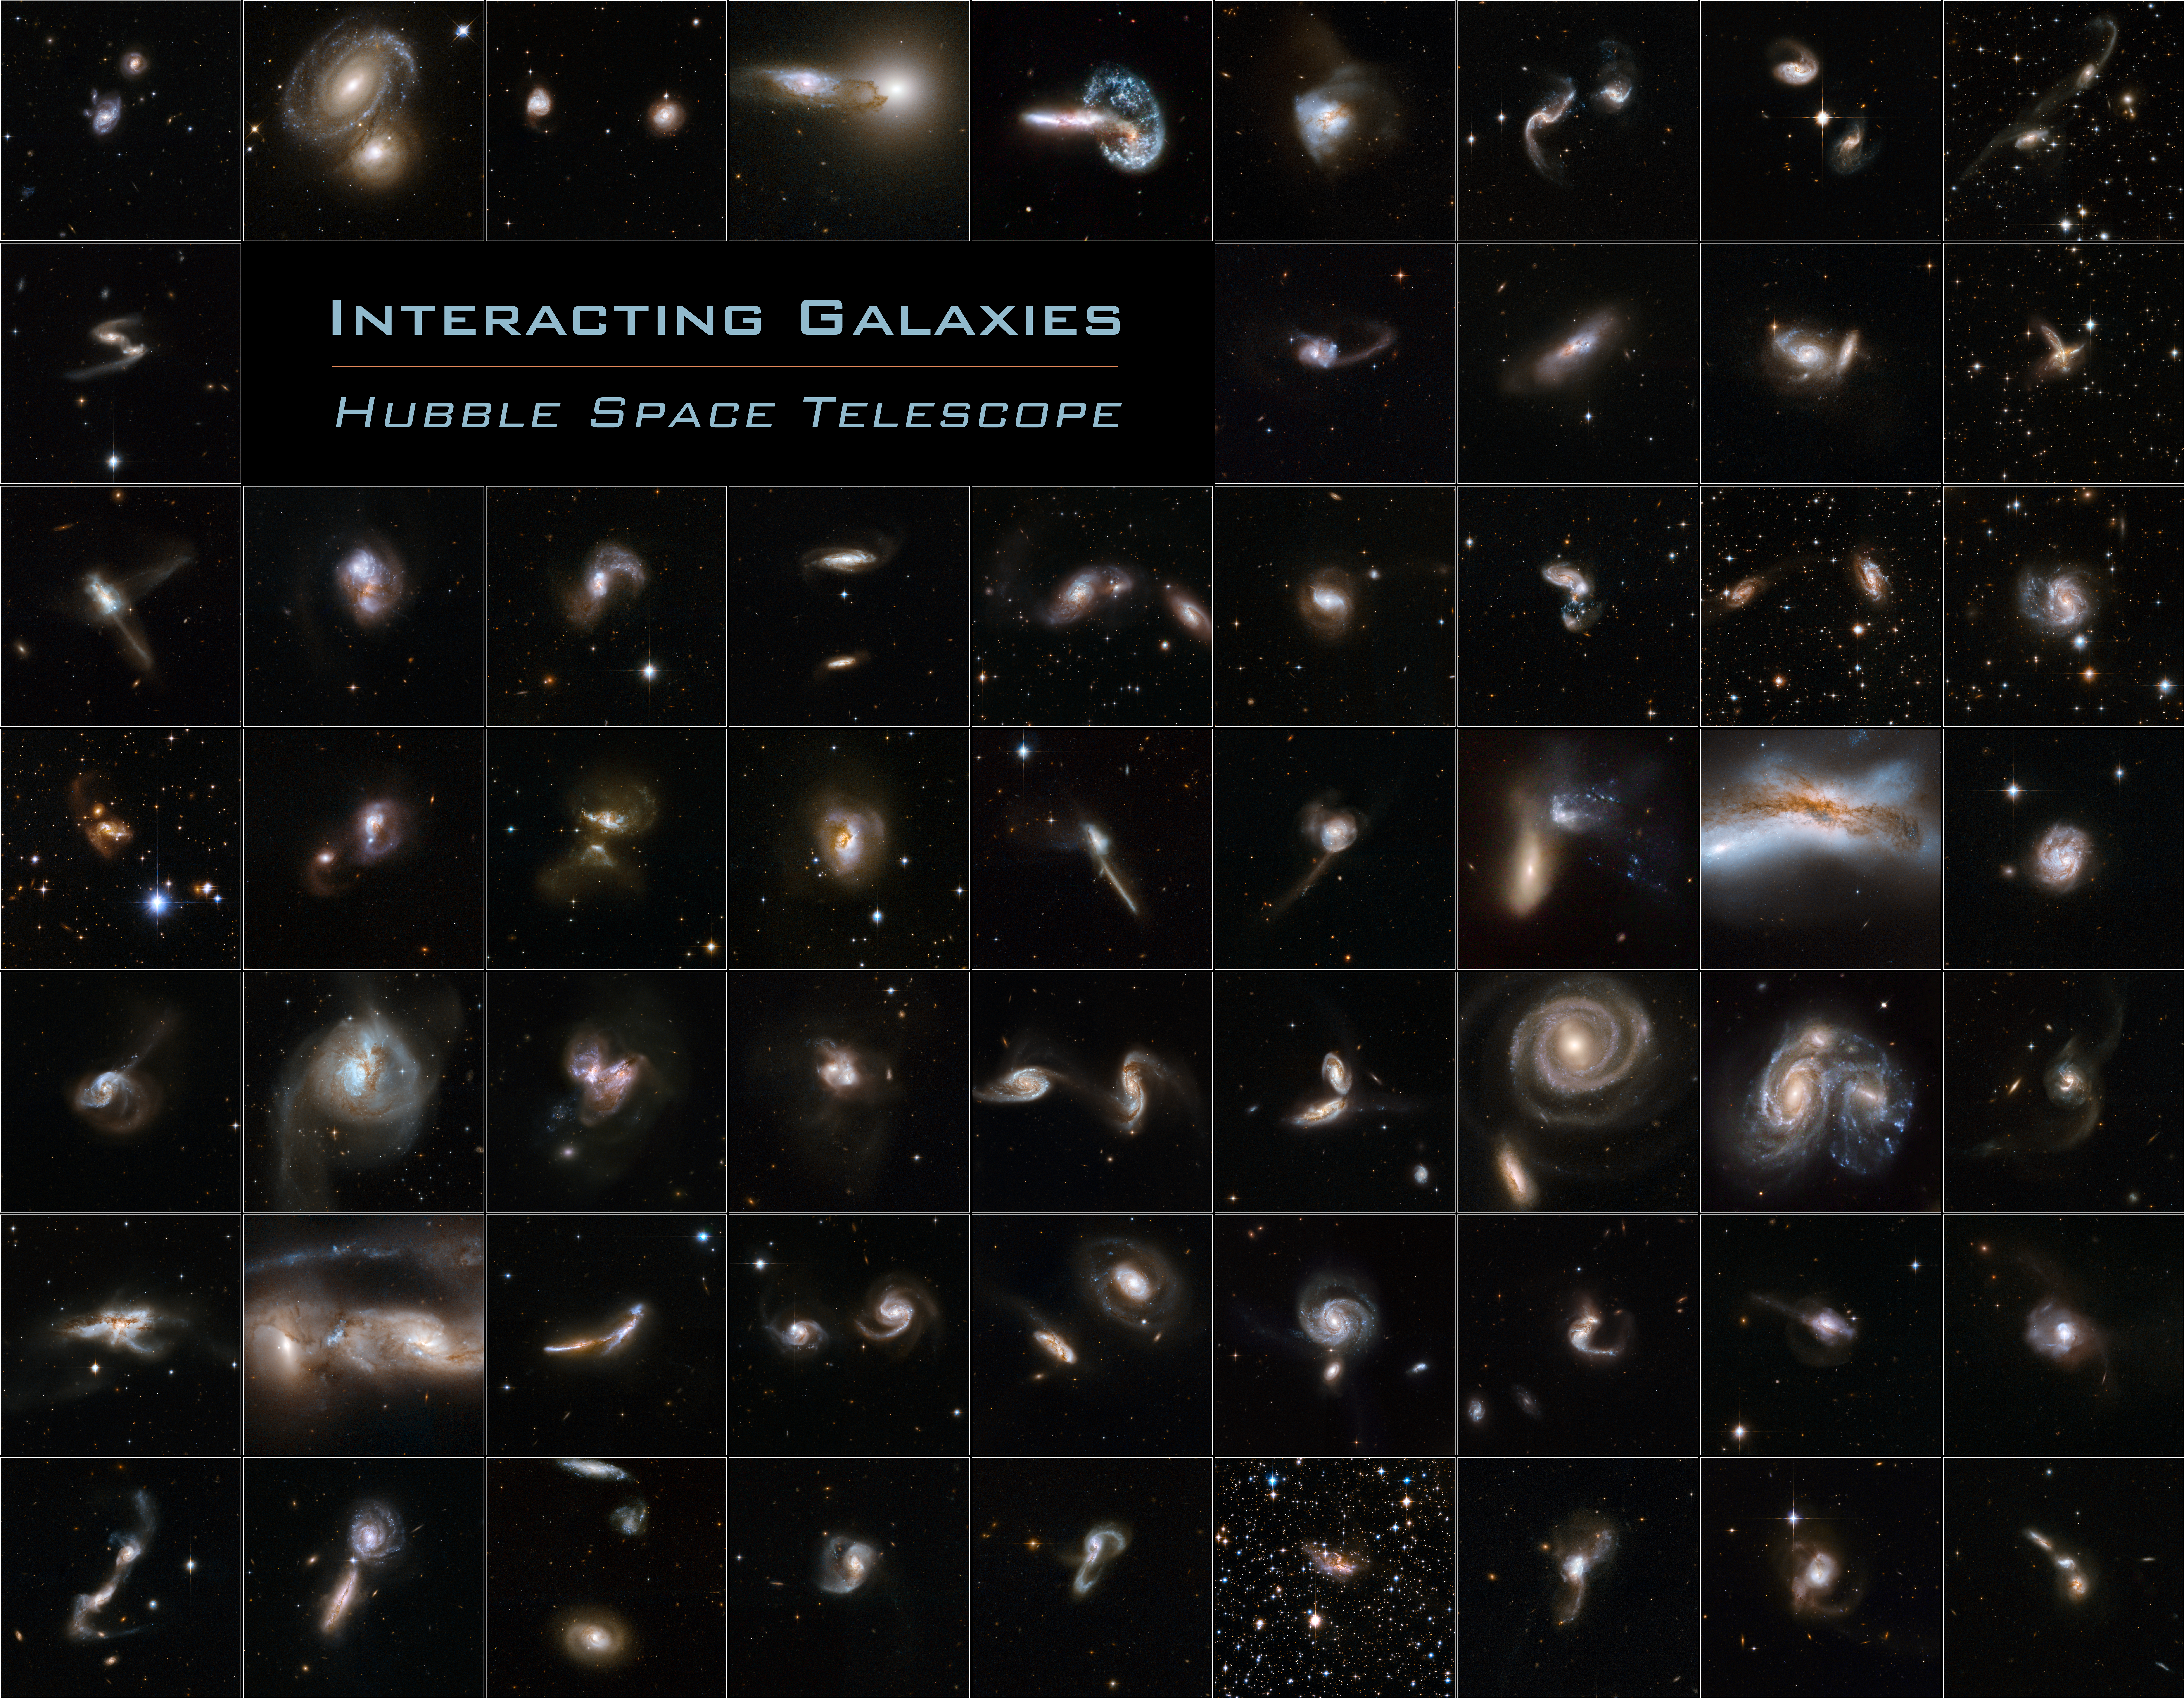

Galaxies Gone Wild!

Fifty nine new images of colliding galaxies make up the largest collection of Hubble images ever released together. As this astonishing Hubble atlas of interacting galaxies illustrates, galaxy collisions produce a remarkable variety of intricate structures.

Most of the 59 new Hubble images are part of a large investigation of luminous and ultraluminous infrared galaxies called the GOALS project (Great Observatories All-sky LIRG Survey). This survey combines observations from Hubble, the NASA Spitzer Space Observatory, the NASA Chandra X-Ray Observatory and NASA Galaxy Explorer. The Hubble observations are led by Professor Aaron S. Evans from the University of Virginia and the National Radio Astronomy Observatory (USA).

Credit: NASA, ESA, the Hubble Heritage Team (STScI/AURA)-ESA/Hubble Collaboration and A. Evans (University of Virginia, Charlottesville/NRAO/Stony Brook University), K. Noll (STScI), and J. Westphal (Caltech)